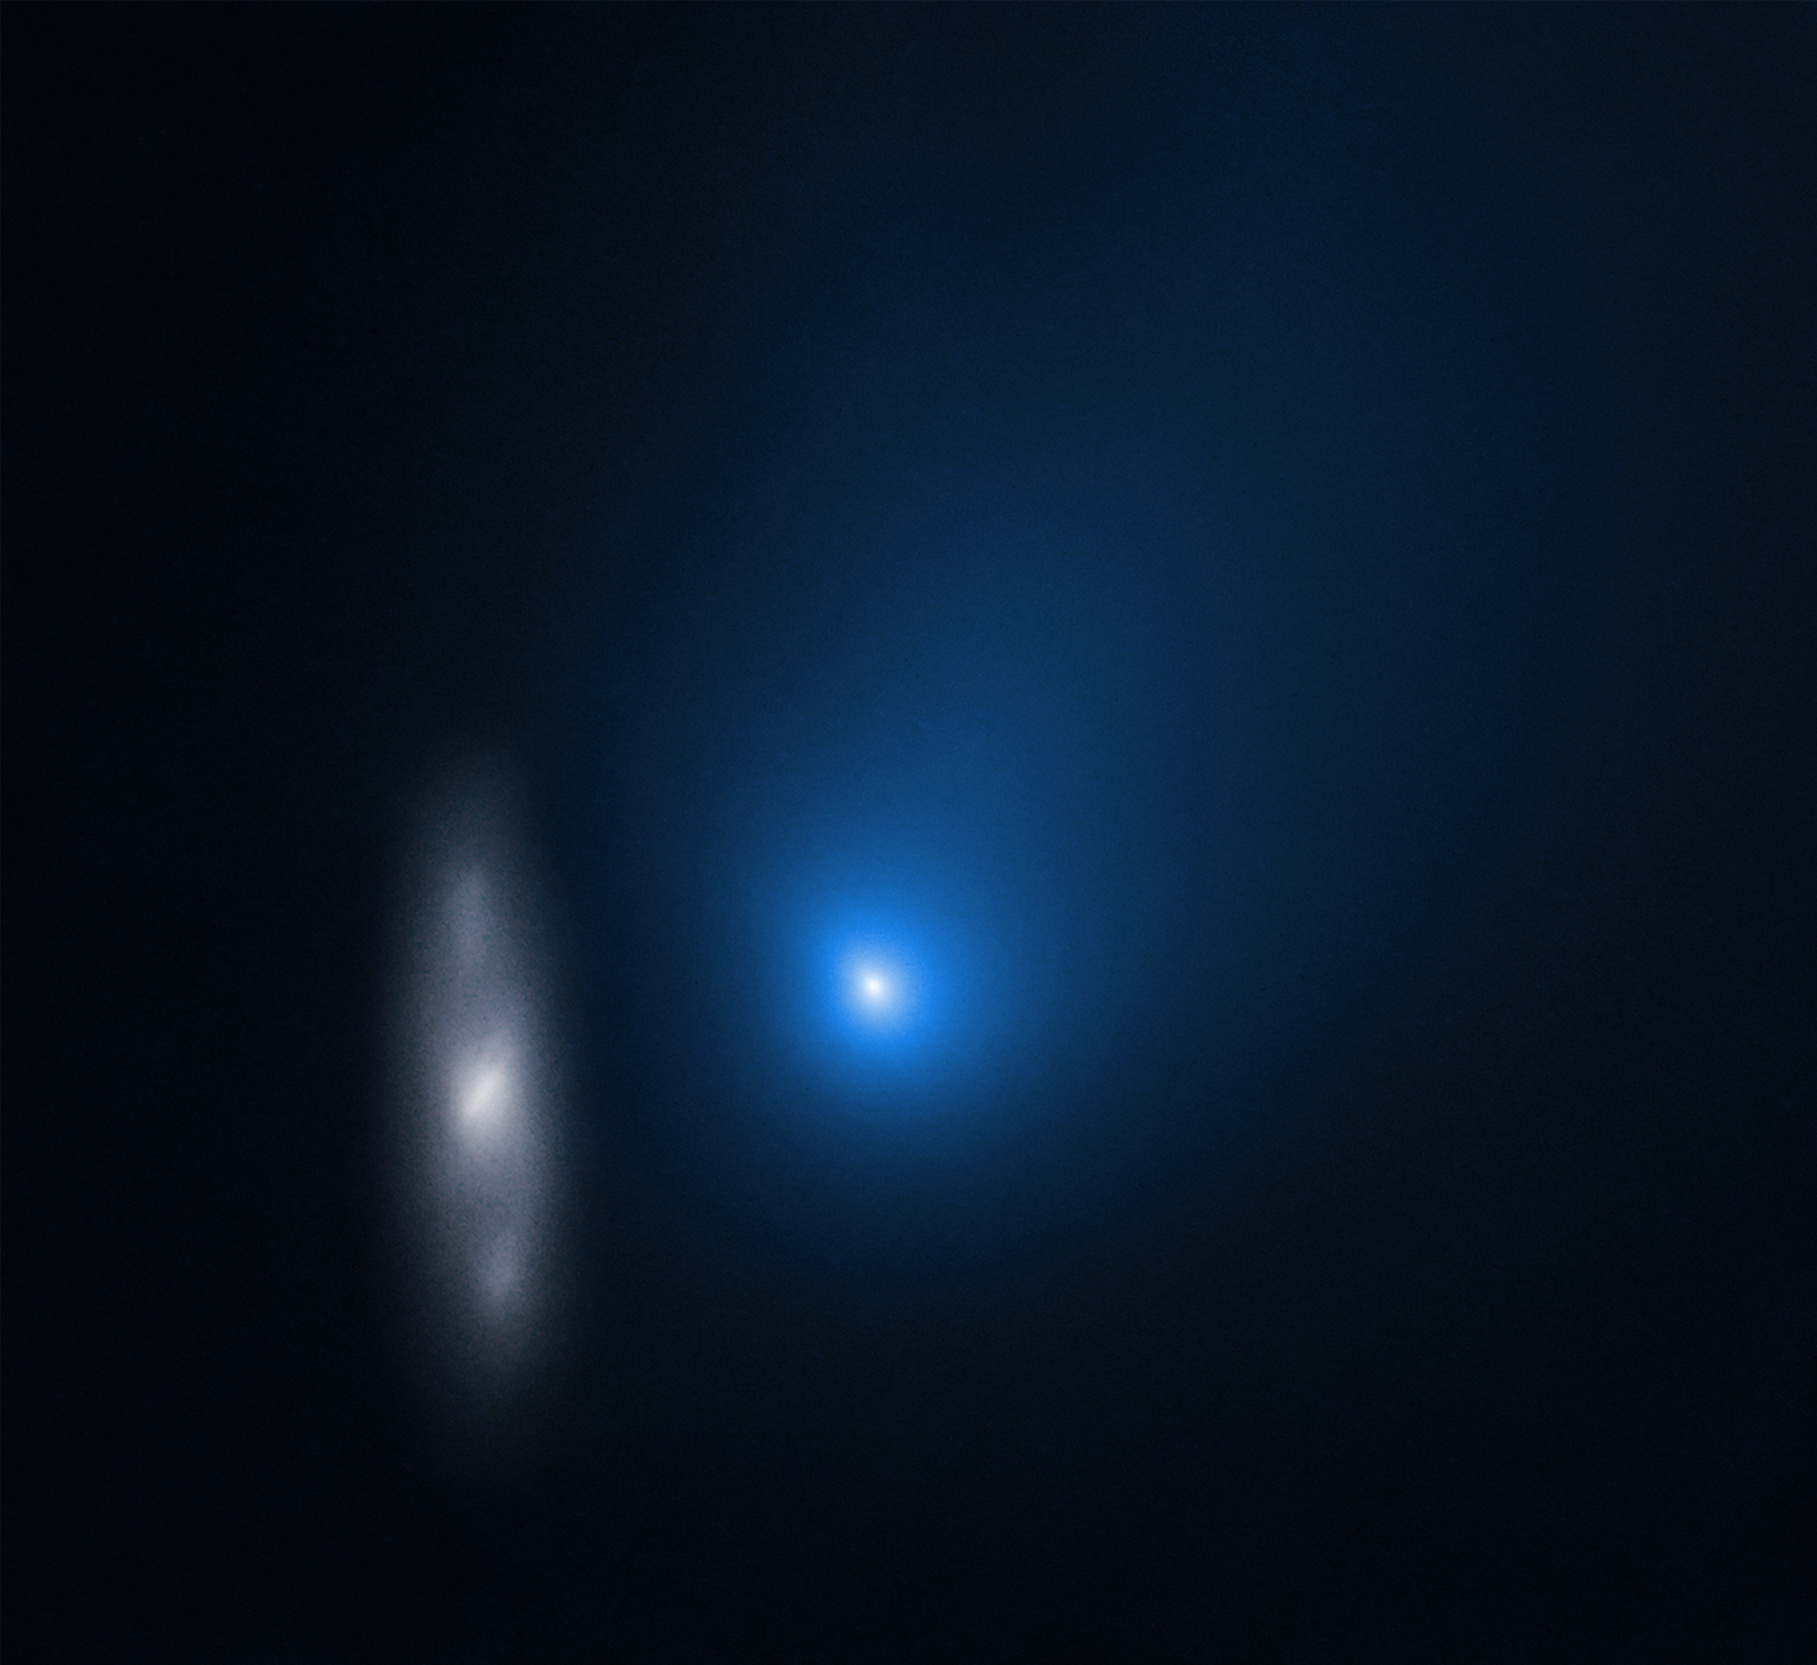

Comet 2I/Borisov and Distant Galaxy in November 2019

Comet 2I/Borisov is only the second interstellar object known to have passed through our Solar System. In this image taken by the NASA/ESA Hubble Space Telescope, the comet appears in front of a distant background spiral galaxy.

The galaxy’s bright central core is smeared in the image because Hubble was tracking the comet. Borisov was approximately 326 million kilometres from Earth in this exposure. Its tail of ejected dust streaks off to the upper right.

Credit: NASA, ESA, and D. Jewitt (UCLA)